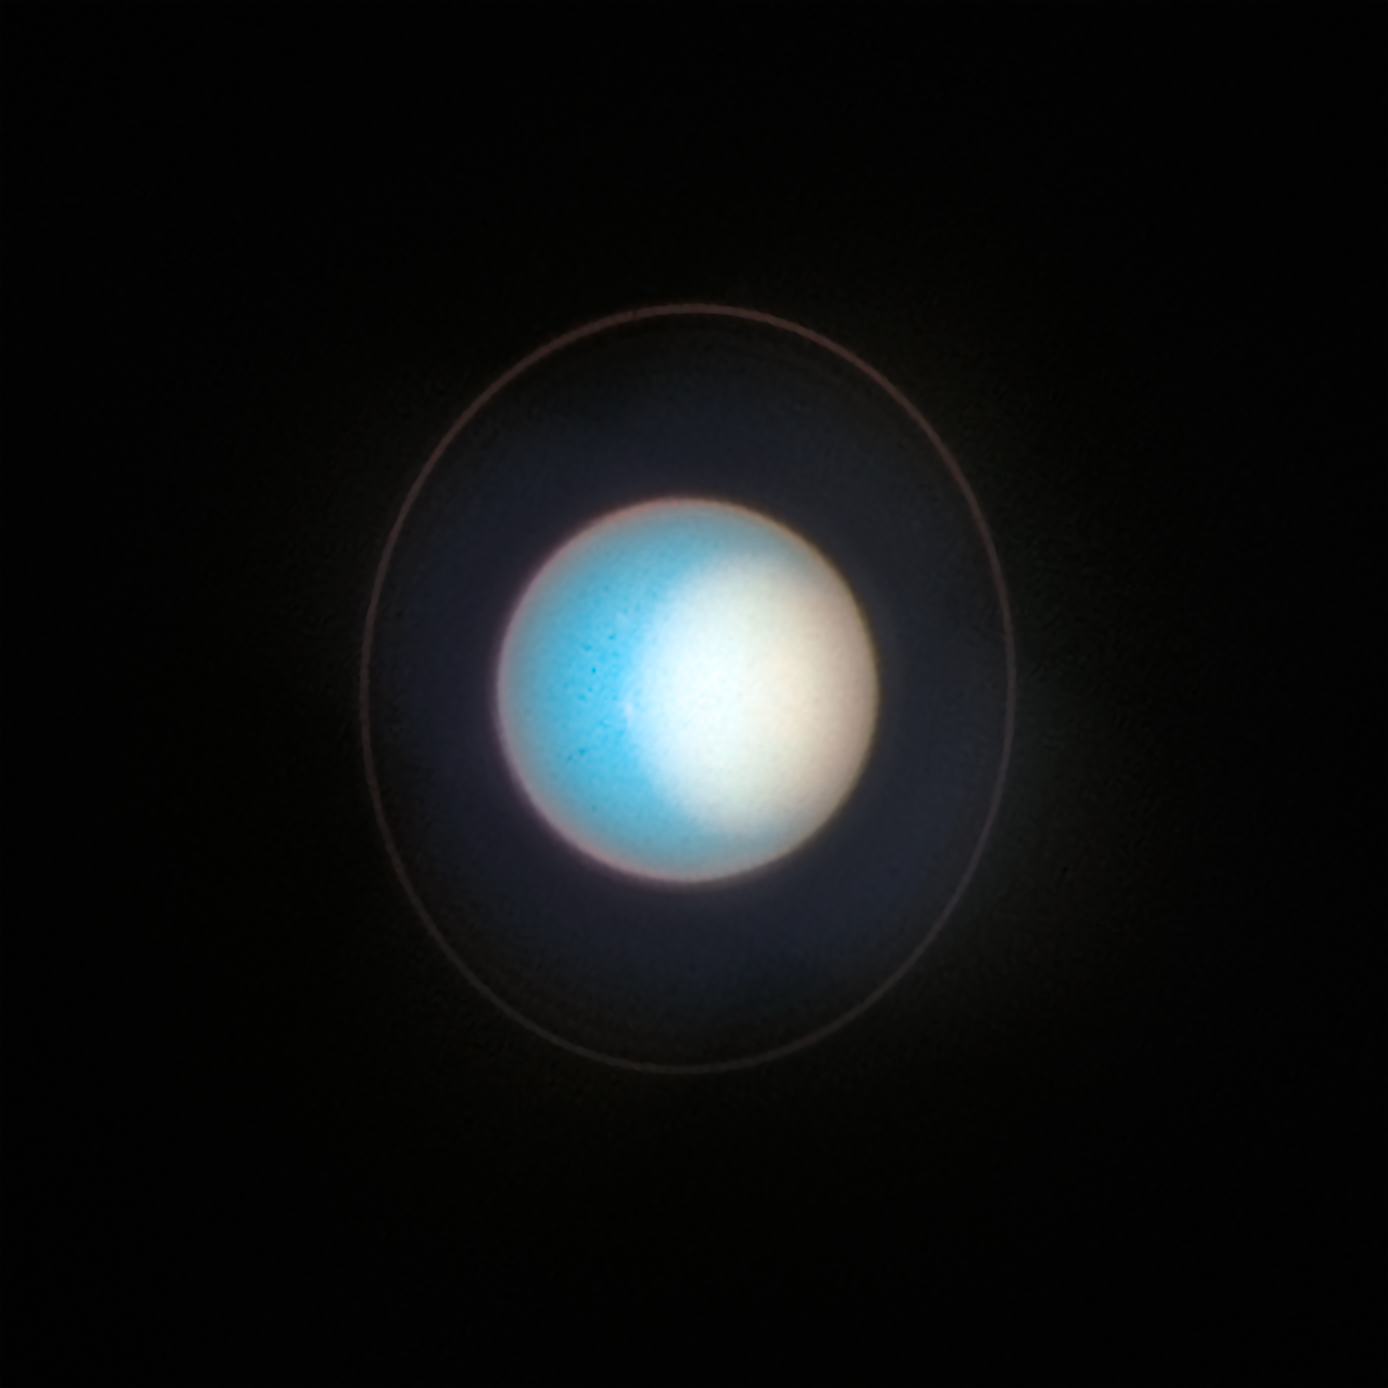

Uranus (November 2022)

As seen in 2022, Uranus’s north pole shows a thickened photochemical haze that looks similar to the smog over cities. Several little storms can be seen near the edge of the polar haze boundary. Hubble has been tracking the size and brightness of the north polar cap and it continues to get brighter year after year. Astronomers are disentangling multiple effects — from atmospheric circulation, particle properties, and chemical processes — that control how the atmospheric polar cap changes with the seasons. At the Uranian equinox in 2007, neither pole was particularly bright. As the northern summer solstice approaches in 2028 the cap may grow brighter still, and will be aimed directly toward Earth, allowing good views of the rings and the north pole; the ring system will then appear face-on. This image was taken on 10 November 2022.

Credit: NASA, ESA, STScI, A. Simon (NASA-GSFC), M. H. Wong (UC Berkeley), J. DePasquale (STScI)